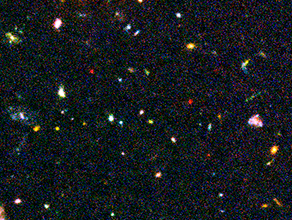

Hubble Ultra Deep Field Most-Distant Galaxy Candidates - Close-up 3

This image of the Hubble Ultra Deep Field (HUDF) — a small region of sky in the direction of the southern constellation Fornax — shows some of the earliest star-forming galaxies in the Universe.

The sensitivity of Hubble's Advanced Camera for Surveys (ACS), combined with the penetrating power of the Near Infrared Camera and Multi-Object Spectrometer (NICMOS) have finally revealed these long-sought after faint galaxies. Some of these faint objects are less than one four-billionth the brightness of stars that can be seen with the naked eye and their light has taken nearly 13 billion years to reach Earth.

Credit: NASA, ESA, R. Windhorst (Arizona State University) and H. Yan (Spitzer Science Center, Caltech)